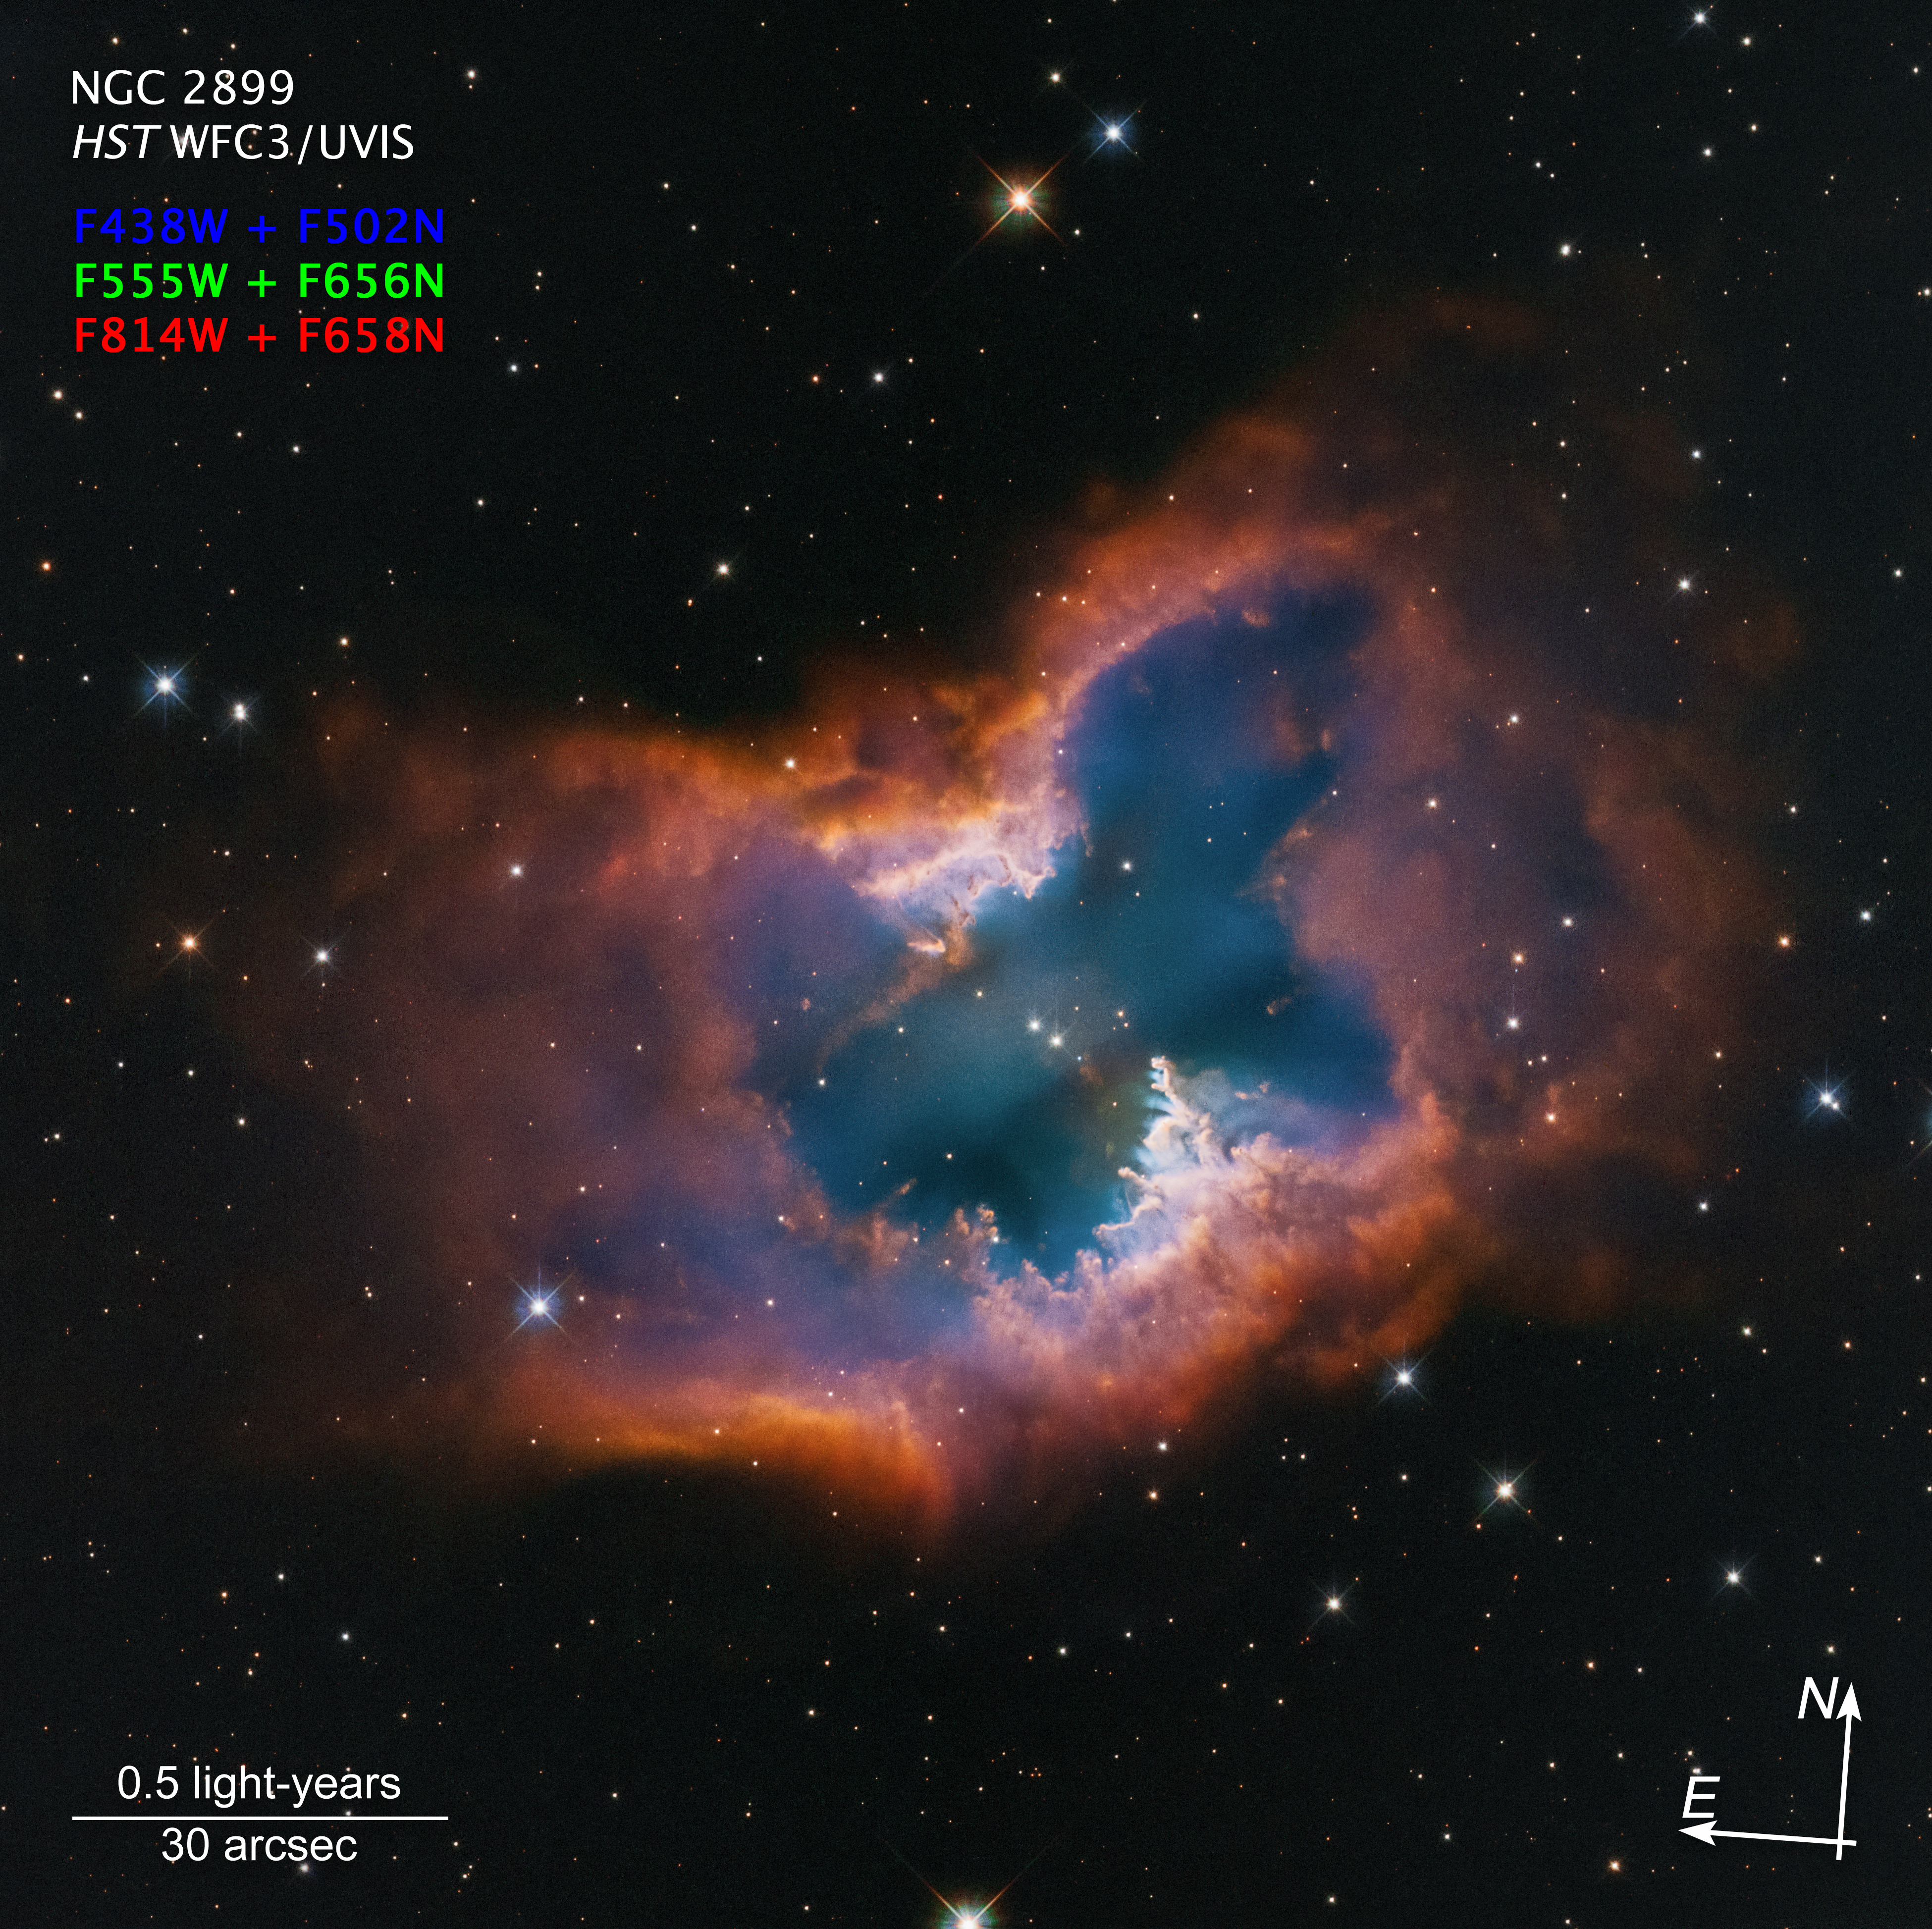

Planetary nebula NGC 2899 (annotated)

This Hubble Space Telescope image captures the beauty of the moth-like planetary nebula NGC 2899. This object has a diagonal, bipolar, cylindrical outflow of gas. This is propelled by radiation and stellar winds from a nearly 22 000 degree Celsius white dwarf at the center. In fact, there may be two companion stars that are interacting and sculpting the nebula, which is pinched in the middle by a fragmented ring or torus – looking like a half-eaten donut. It has a forest of gaseous “pillars” that point back to the source of radiation and stellar winds. The colours are from glowing hydrogen and oxygen. The nebula lies approximately 4,500 light-years away in the southern constellation Vela.

Credit: NASA, ESA, STScI